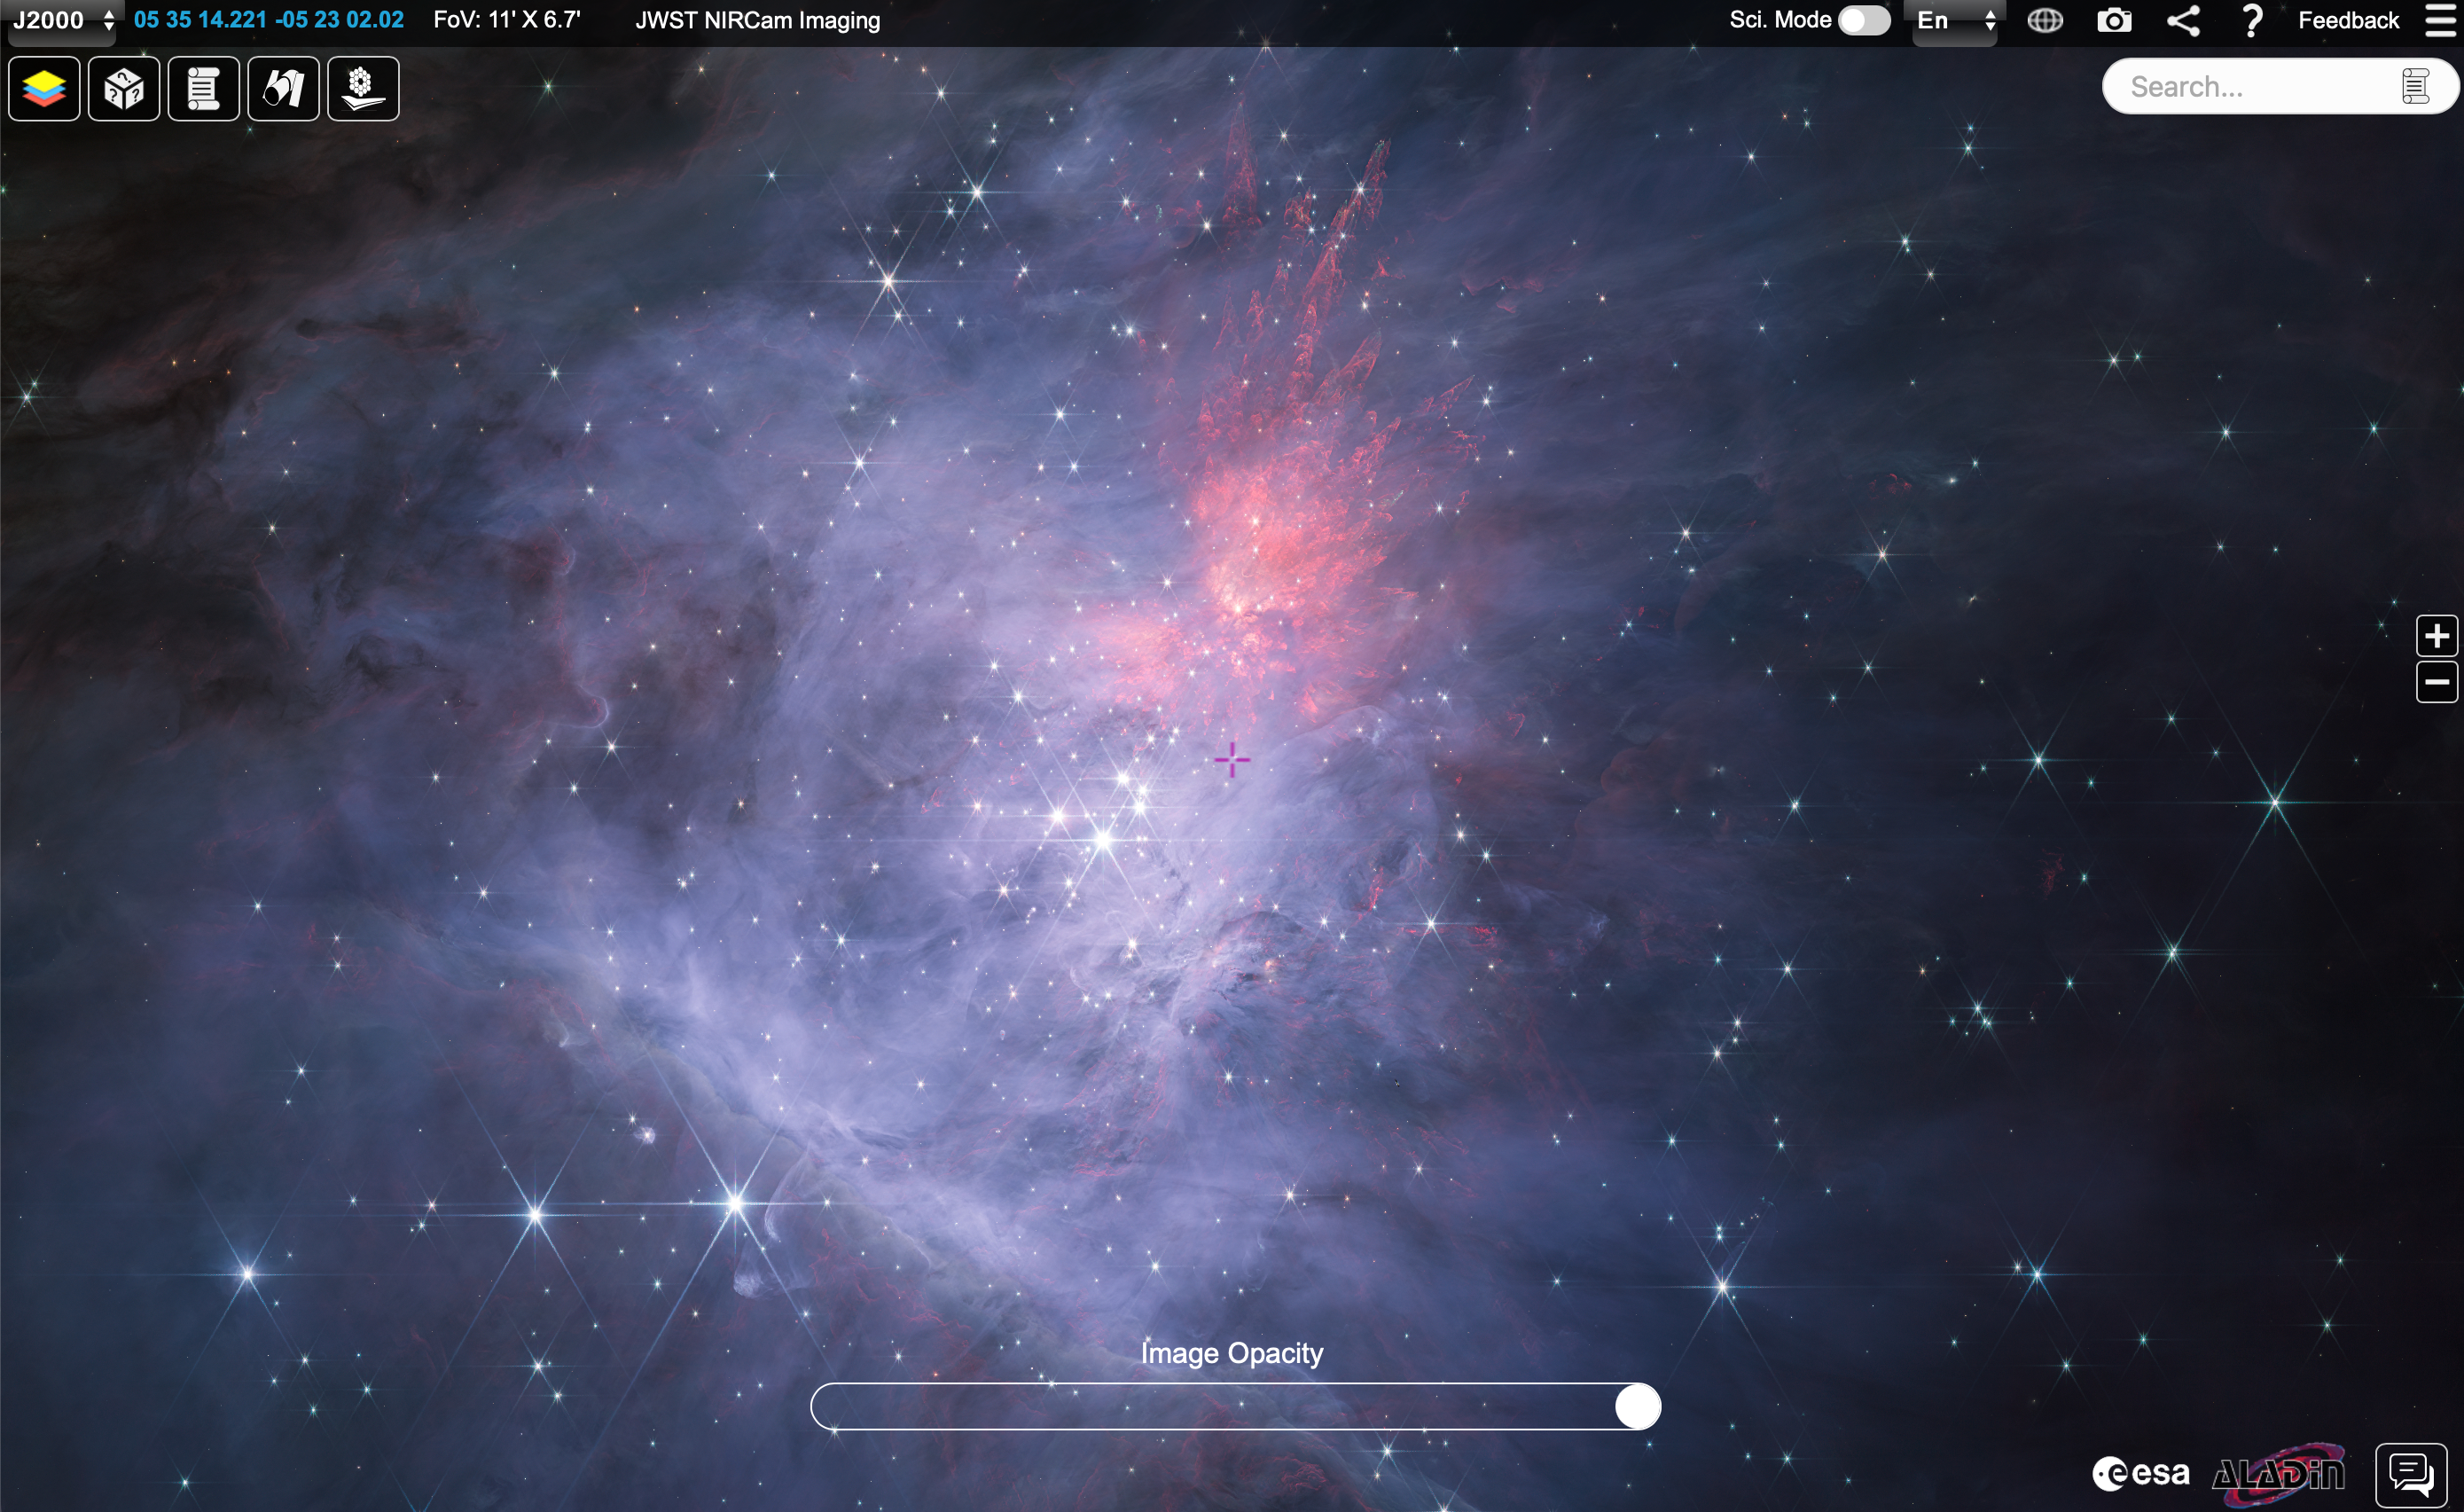

Short-wavelength NIRCam Orion mosaic in ESASky

This image shows a short-wavelength NIRCam mosaic of the inner Orion Nebula and Trapezium Cluster. It shows a region 4 light years across, slightly less than the distance between the Sun and our nearest neighbour, Proxima Centauri. The full image on ESASky measures 21,000 x 14,351 pixels and can be viewed here.

Credit: NASA, ESA, CSAScience leads and image processing: M. McCaughrean, S. Pearson